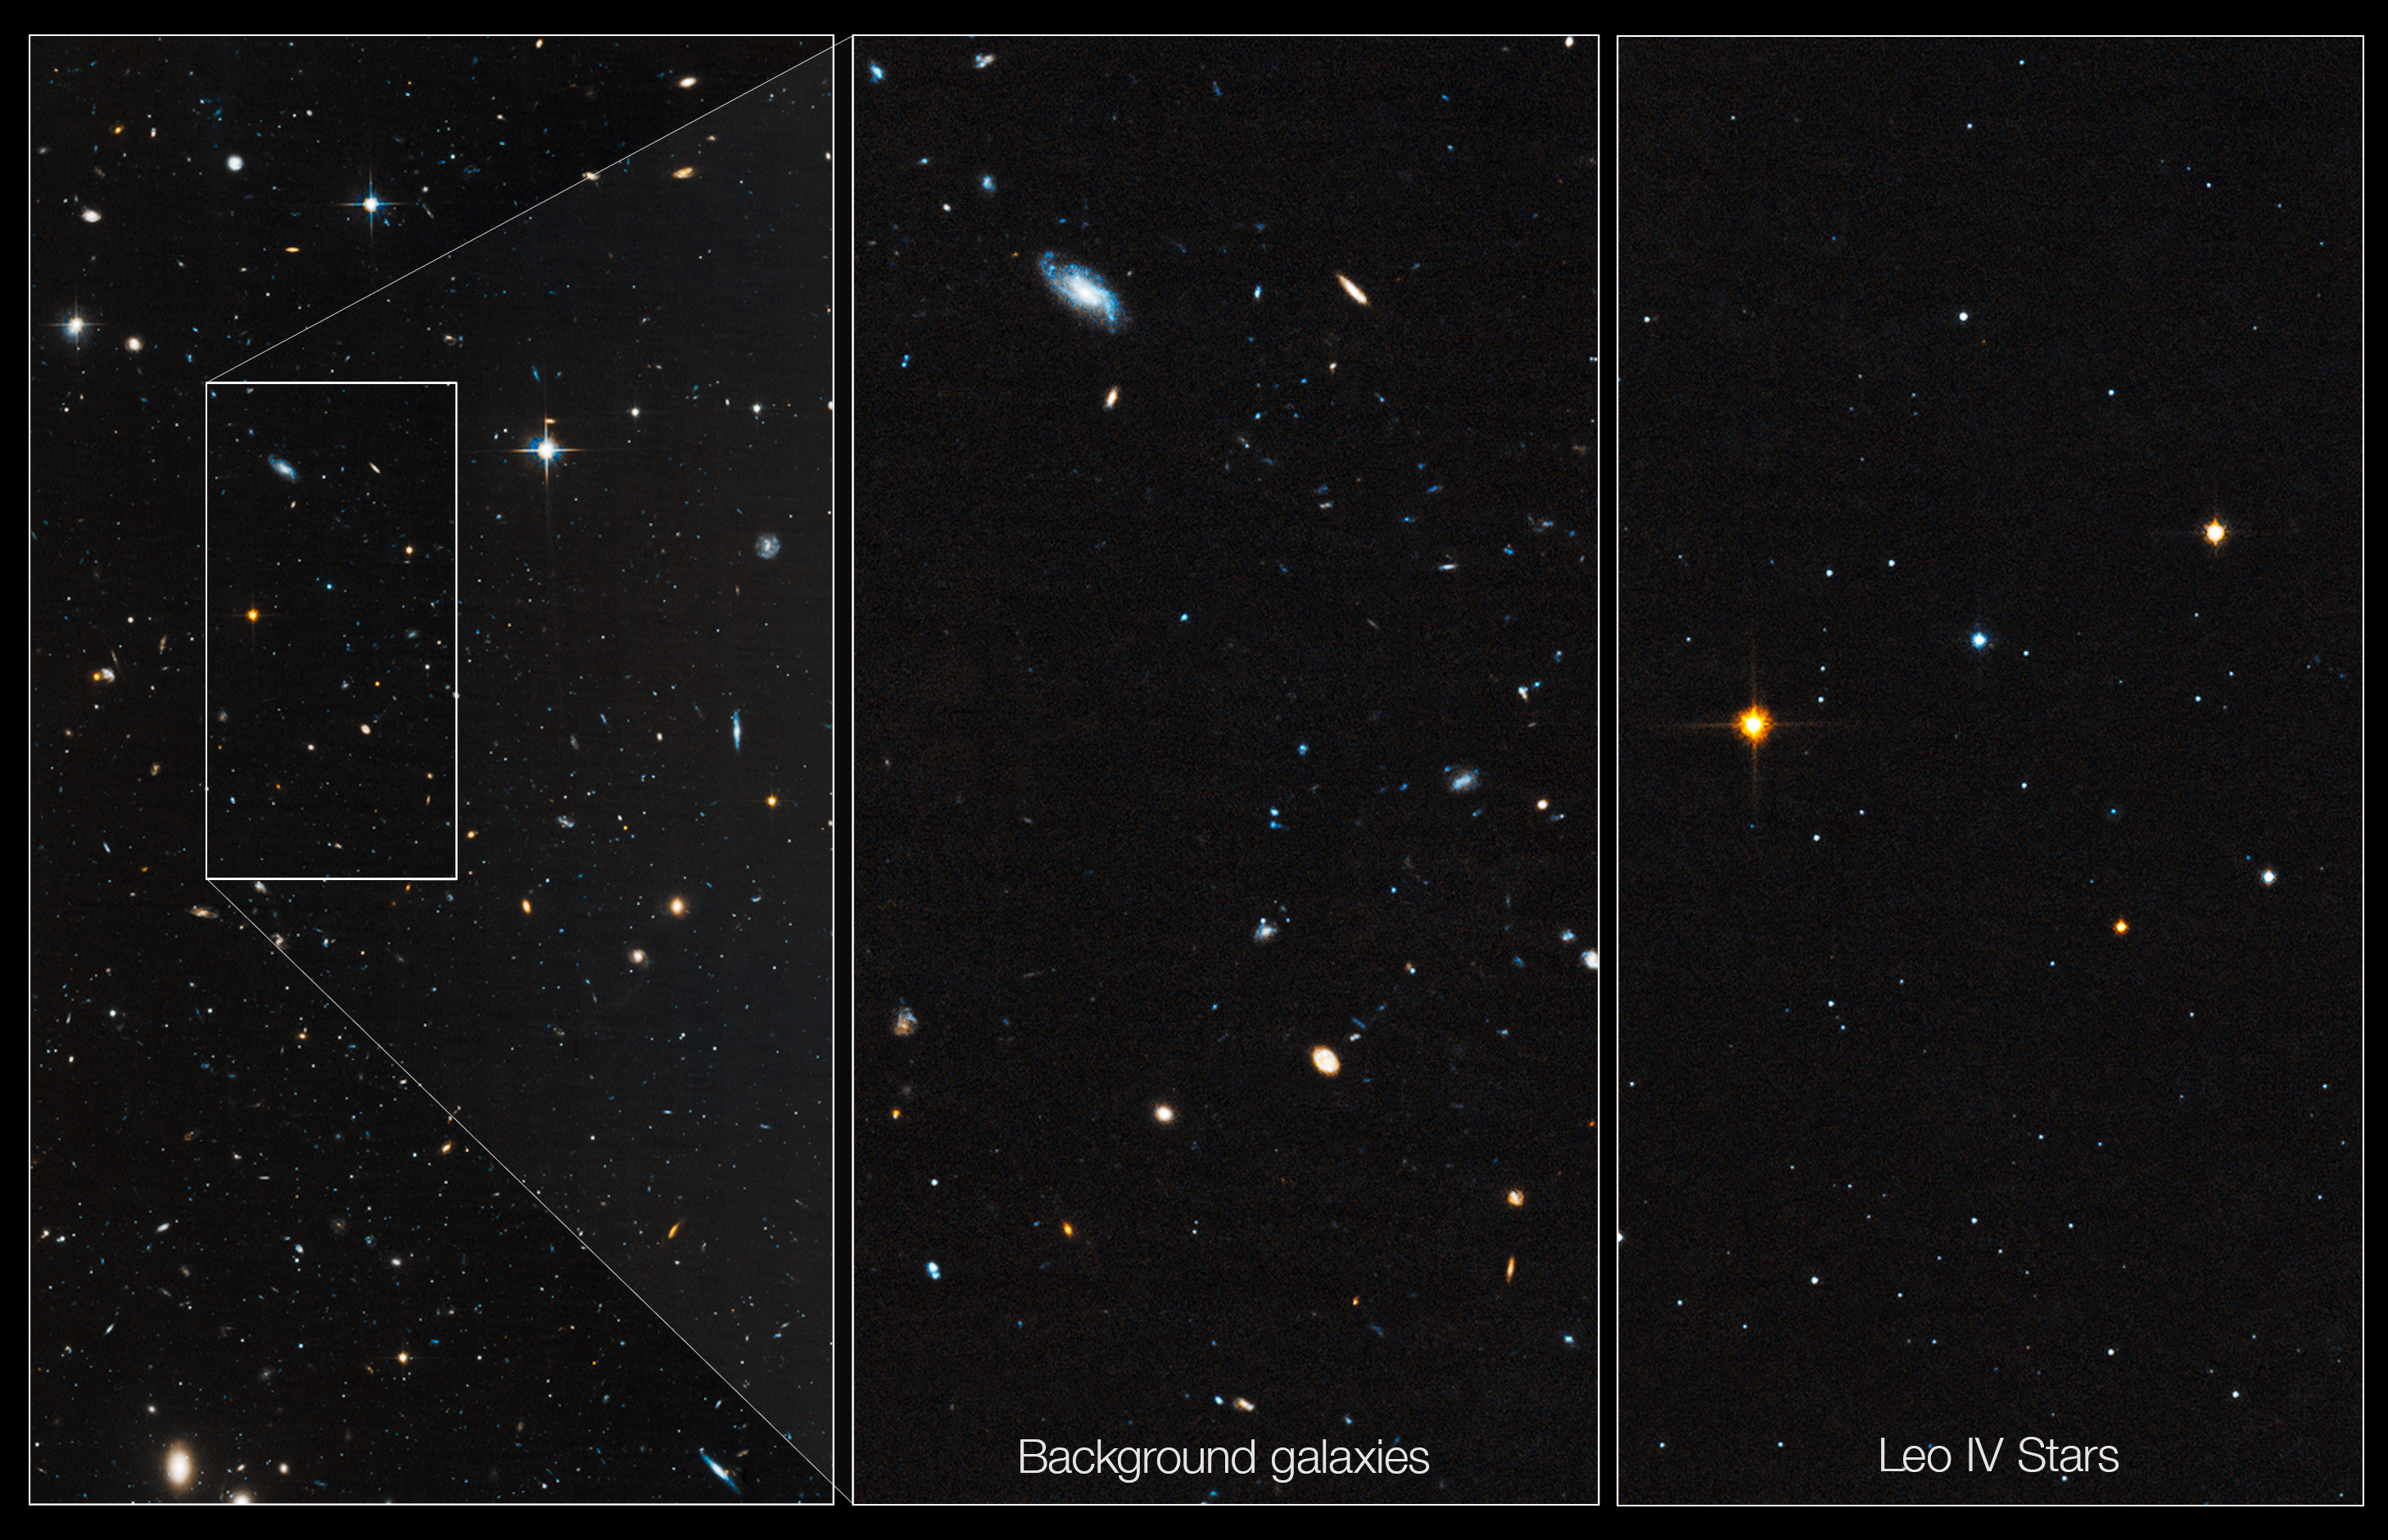

Hubble probes ‘ghost’ galaxy

Astronomers used the NASA/ESA Hubble Space Telescope to unmask the dim, star-starved dwarf galaxy Leo IV. These Hubble images demonstrate why astronomers had a tough time spotting this small-fry galaxy.

The image at left shows part of the galaxy, outlined by the white rectangular box. The box measures 83 light-years wide by 163 light-years long. The few stars in Leo IV are lost amid neighboring stars and distant galaxies.

A close-up view of the background galaxies within the box is shown in the middle image.

The image at right shows only the stars in Leo IV. The galaxy, which contains several thousand stars, is composed of Sun-like stars, fainter, red dwarf stars, and some red giant stars brighter than the Sun. Astronomers discovered Leo IV in Sloan Digital Sky Survey images by spotting a region where a clump of stars was huddled closer together than stars in areas around it.

Residing 500 000 light-years from Earth, Leo IV is one of more than a dozen ultra-faint dwarf galaxies found lurking around our Milky Way galaxy. These galaxies are dominated by dark matter, an invisible substance that makes up the bulk of the Universe’s mass.

Credit: NASA, ESA, and T. Brown (STScI)